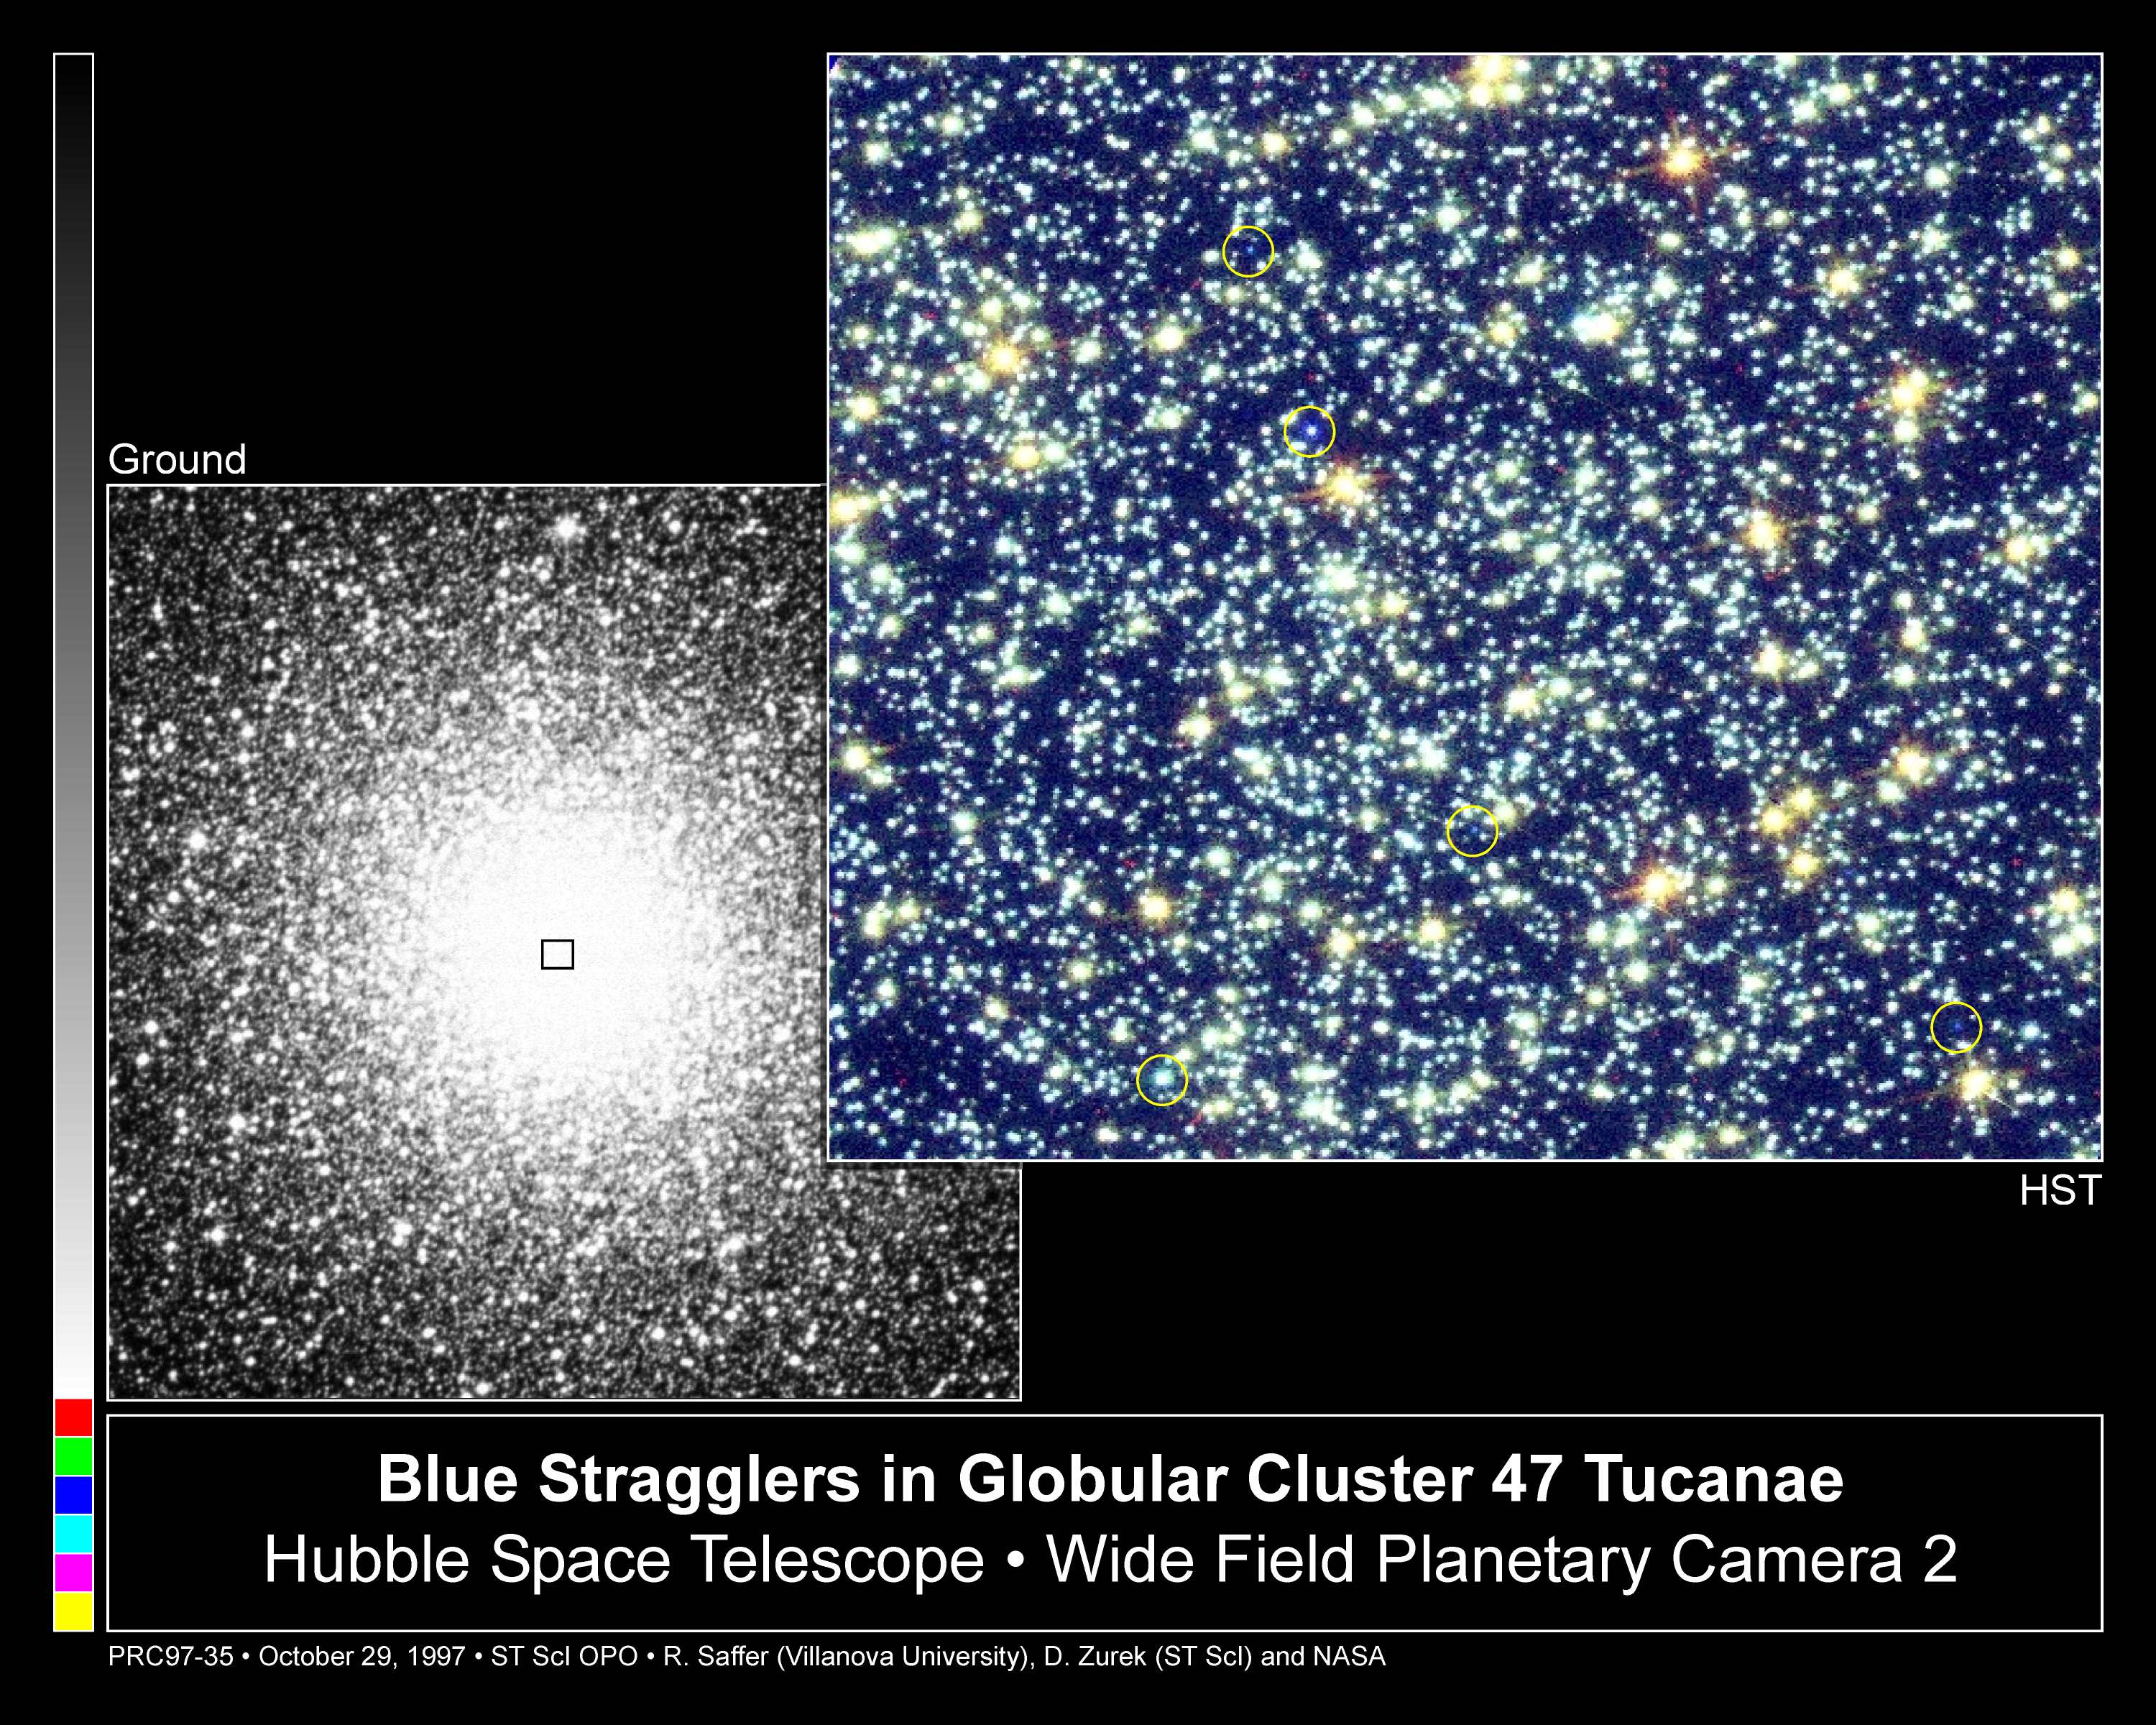

Blue Stragglers in Globular Cluster 47 Tucanae

The core of globular cluster 47 Tucanae is home to many blue stragglers, rejuvenated stars that glow with the blue light of young stars. A ground-based telescope image (on the left) shows the entire crowded core of 47 Tucanae, located 15,000 light-years away in the constellation Tucana. Peering into the heart of the globular cluster's bright core, the Hubble Space Telescope's Wide Field and Planetary Camera 2 separated the dense clump of stars into many individual stars (image on right). Some of these stars shine with the light of old stars; others with the blue light of blue stragglers. The yellow circles in the Hubble telescope image highlight several of the cluster's blue stragglers. Analysis for this observation centered on one massive blue straggler.

Astronomers theorize that blue stragglers are formed either by the slow merger of stars in a double-star system or by the collision of two unrelated stars. For the blue straggler in 47 Tucanae, astronomers favor the slow merger scenario.

Credit: R. Saffer (Villanova University), D. Zurek (STScI) and NASA/ESA